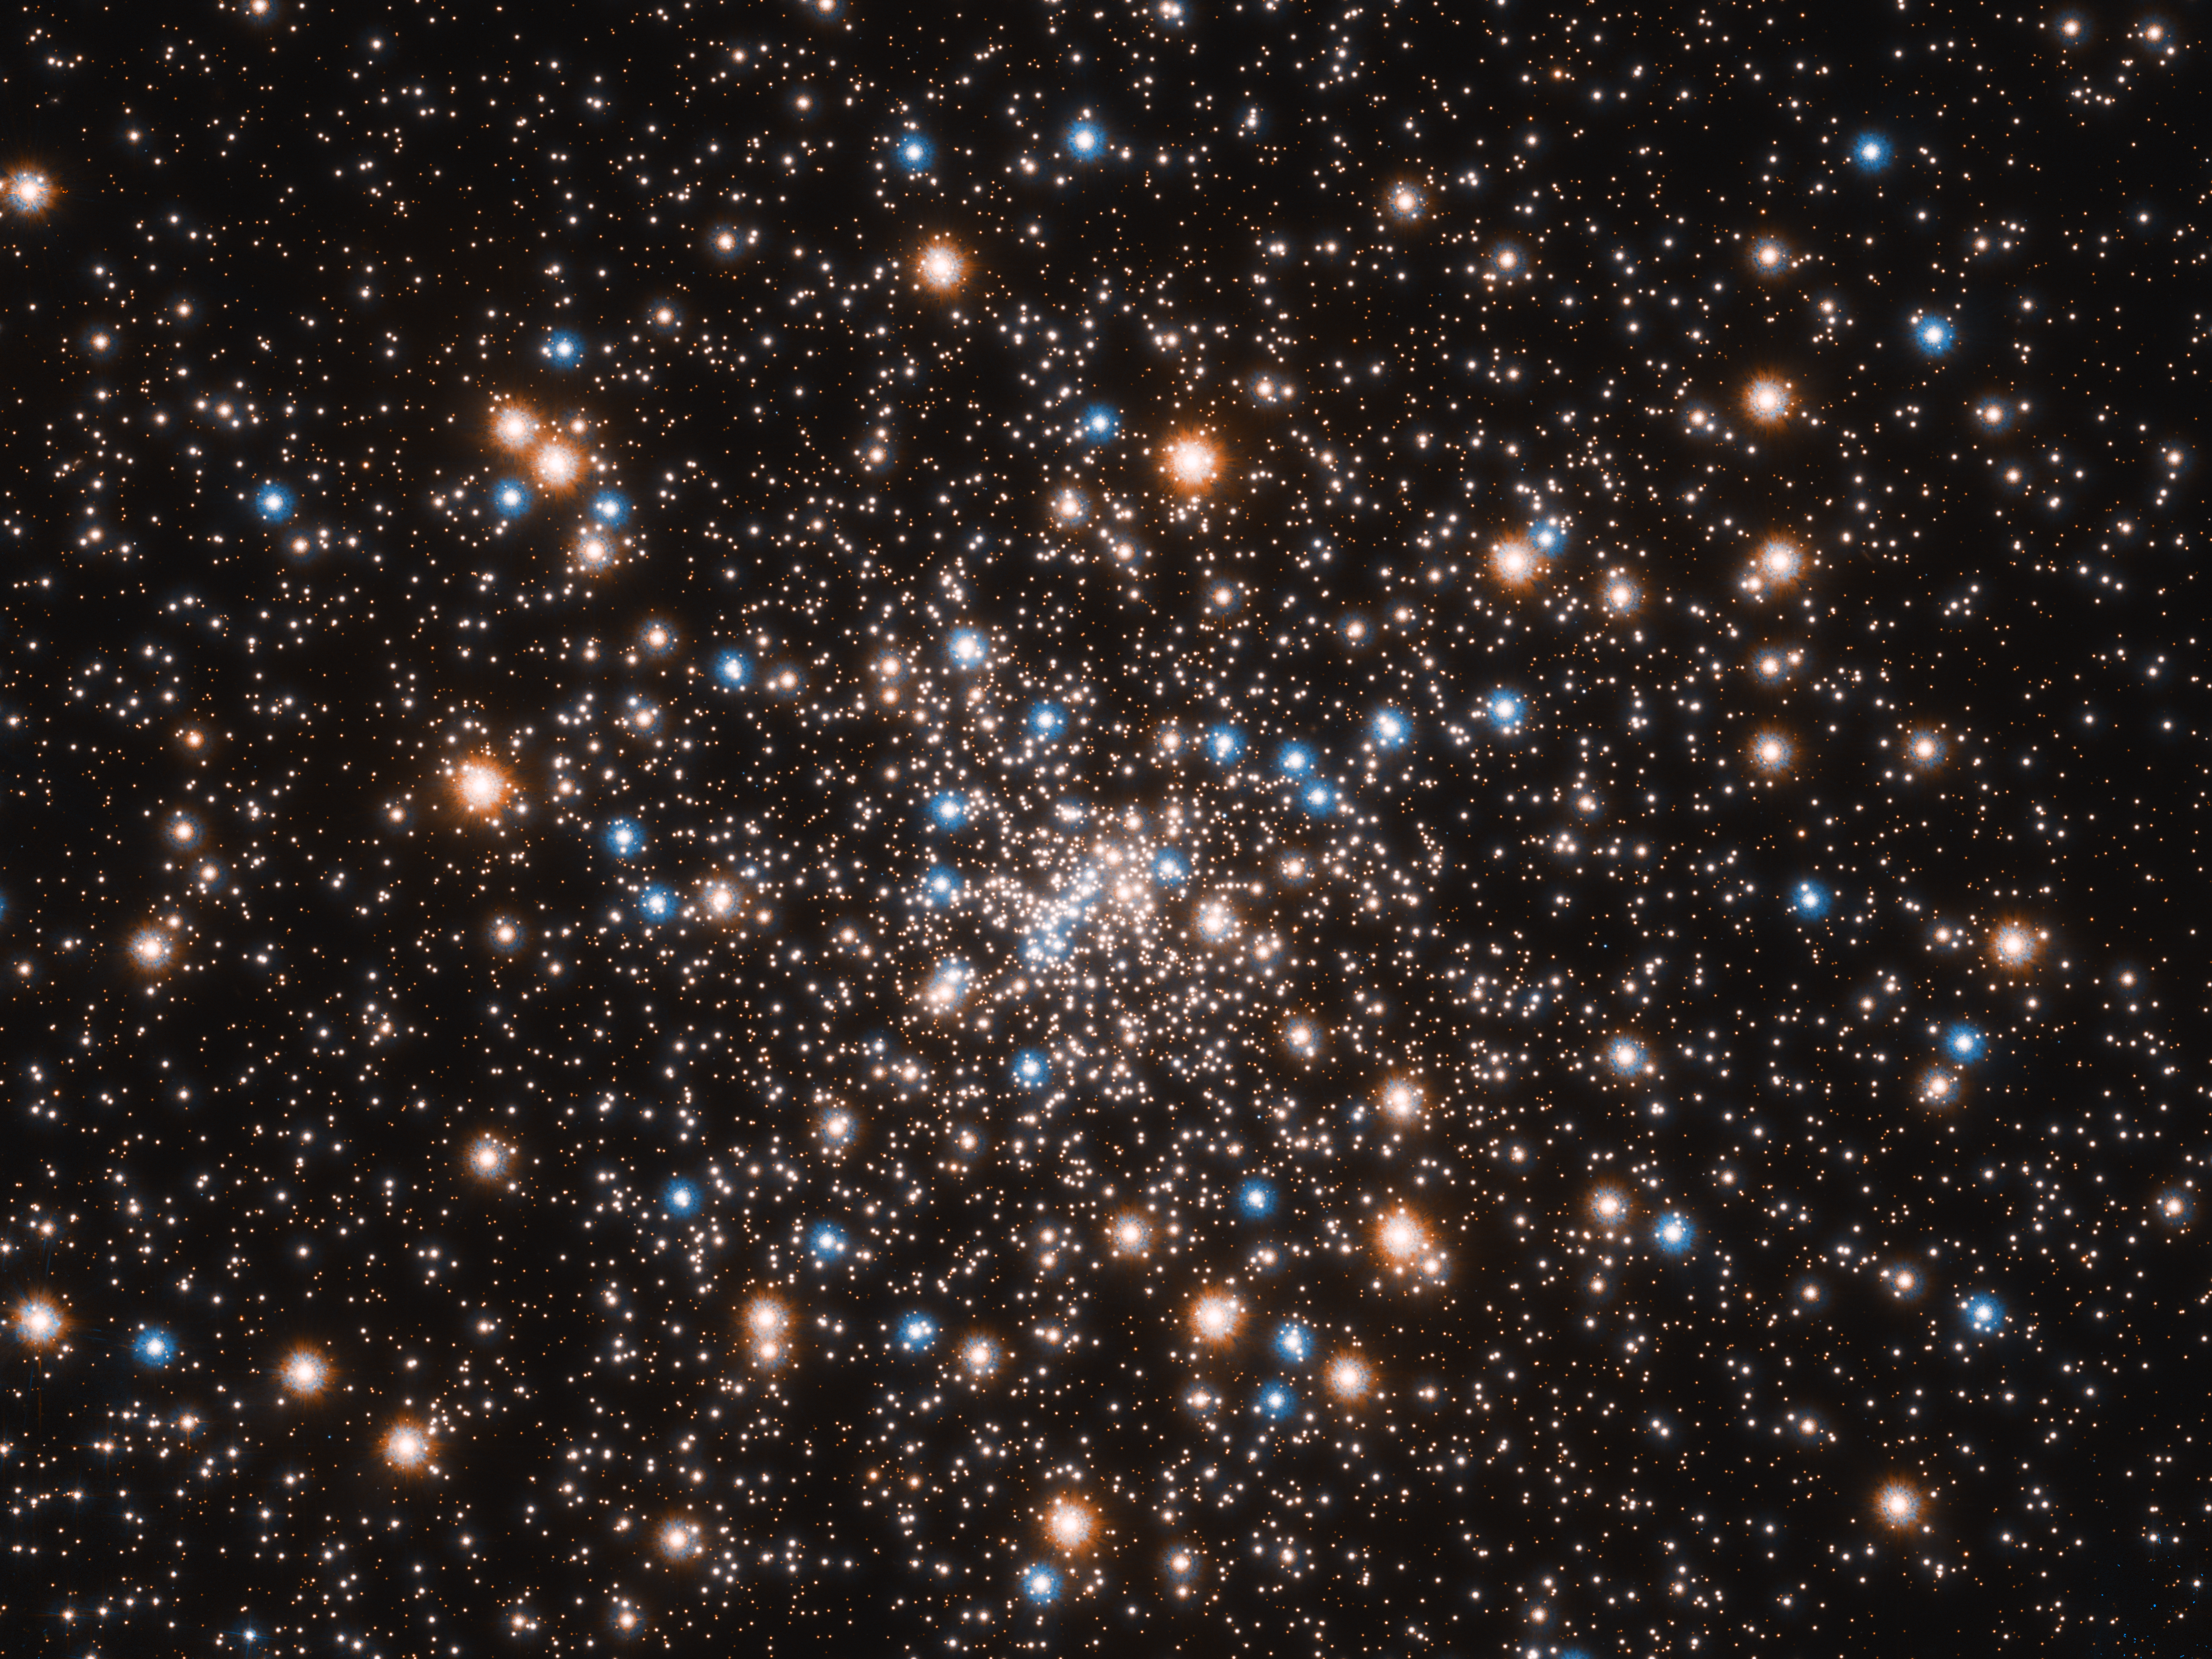

Hubble's view of dazzling globular cluster NGC 6397

This ancient stellar jewelry box, a globular cluster called NGC 6397, glitters with the light from hundreds of thousands of stars.

Astronomers used the NASA/ESA Hubble Space Telescope to gauge the cluster’s distance at 7800 light-years away. NGC 6397 is one of the closest globular clusters to Earth.

The cluster’s blue stars are near the end of their lives. These stars have used up their hydrogen fuel that makes them shine. Now they are converting helium to energy in their cores, which fuses at a higher temperature and appears blue.

The reddish glow is from red giant stars that have consumed their hydrogen fuel and have expanded in size.

The myriad small white objects include stars like our Sun.

This image is composed of a series of observations taken from July 2004 to June 2005 with Hubble’s Advanced Camera for Surveys. The research team used Hubble’s Wide Field Camera 3 to measure the distance to the cluster.

Credit: NASA, ESA, and T. Brown and S. Casertano (STScI) Acknowledgement: NASA, ESA, and J. Anderson (STScI)